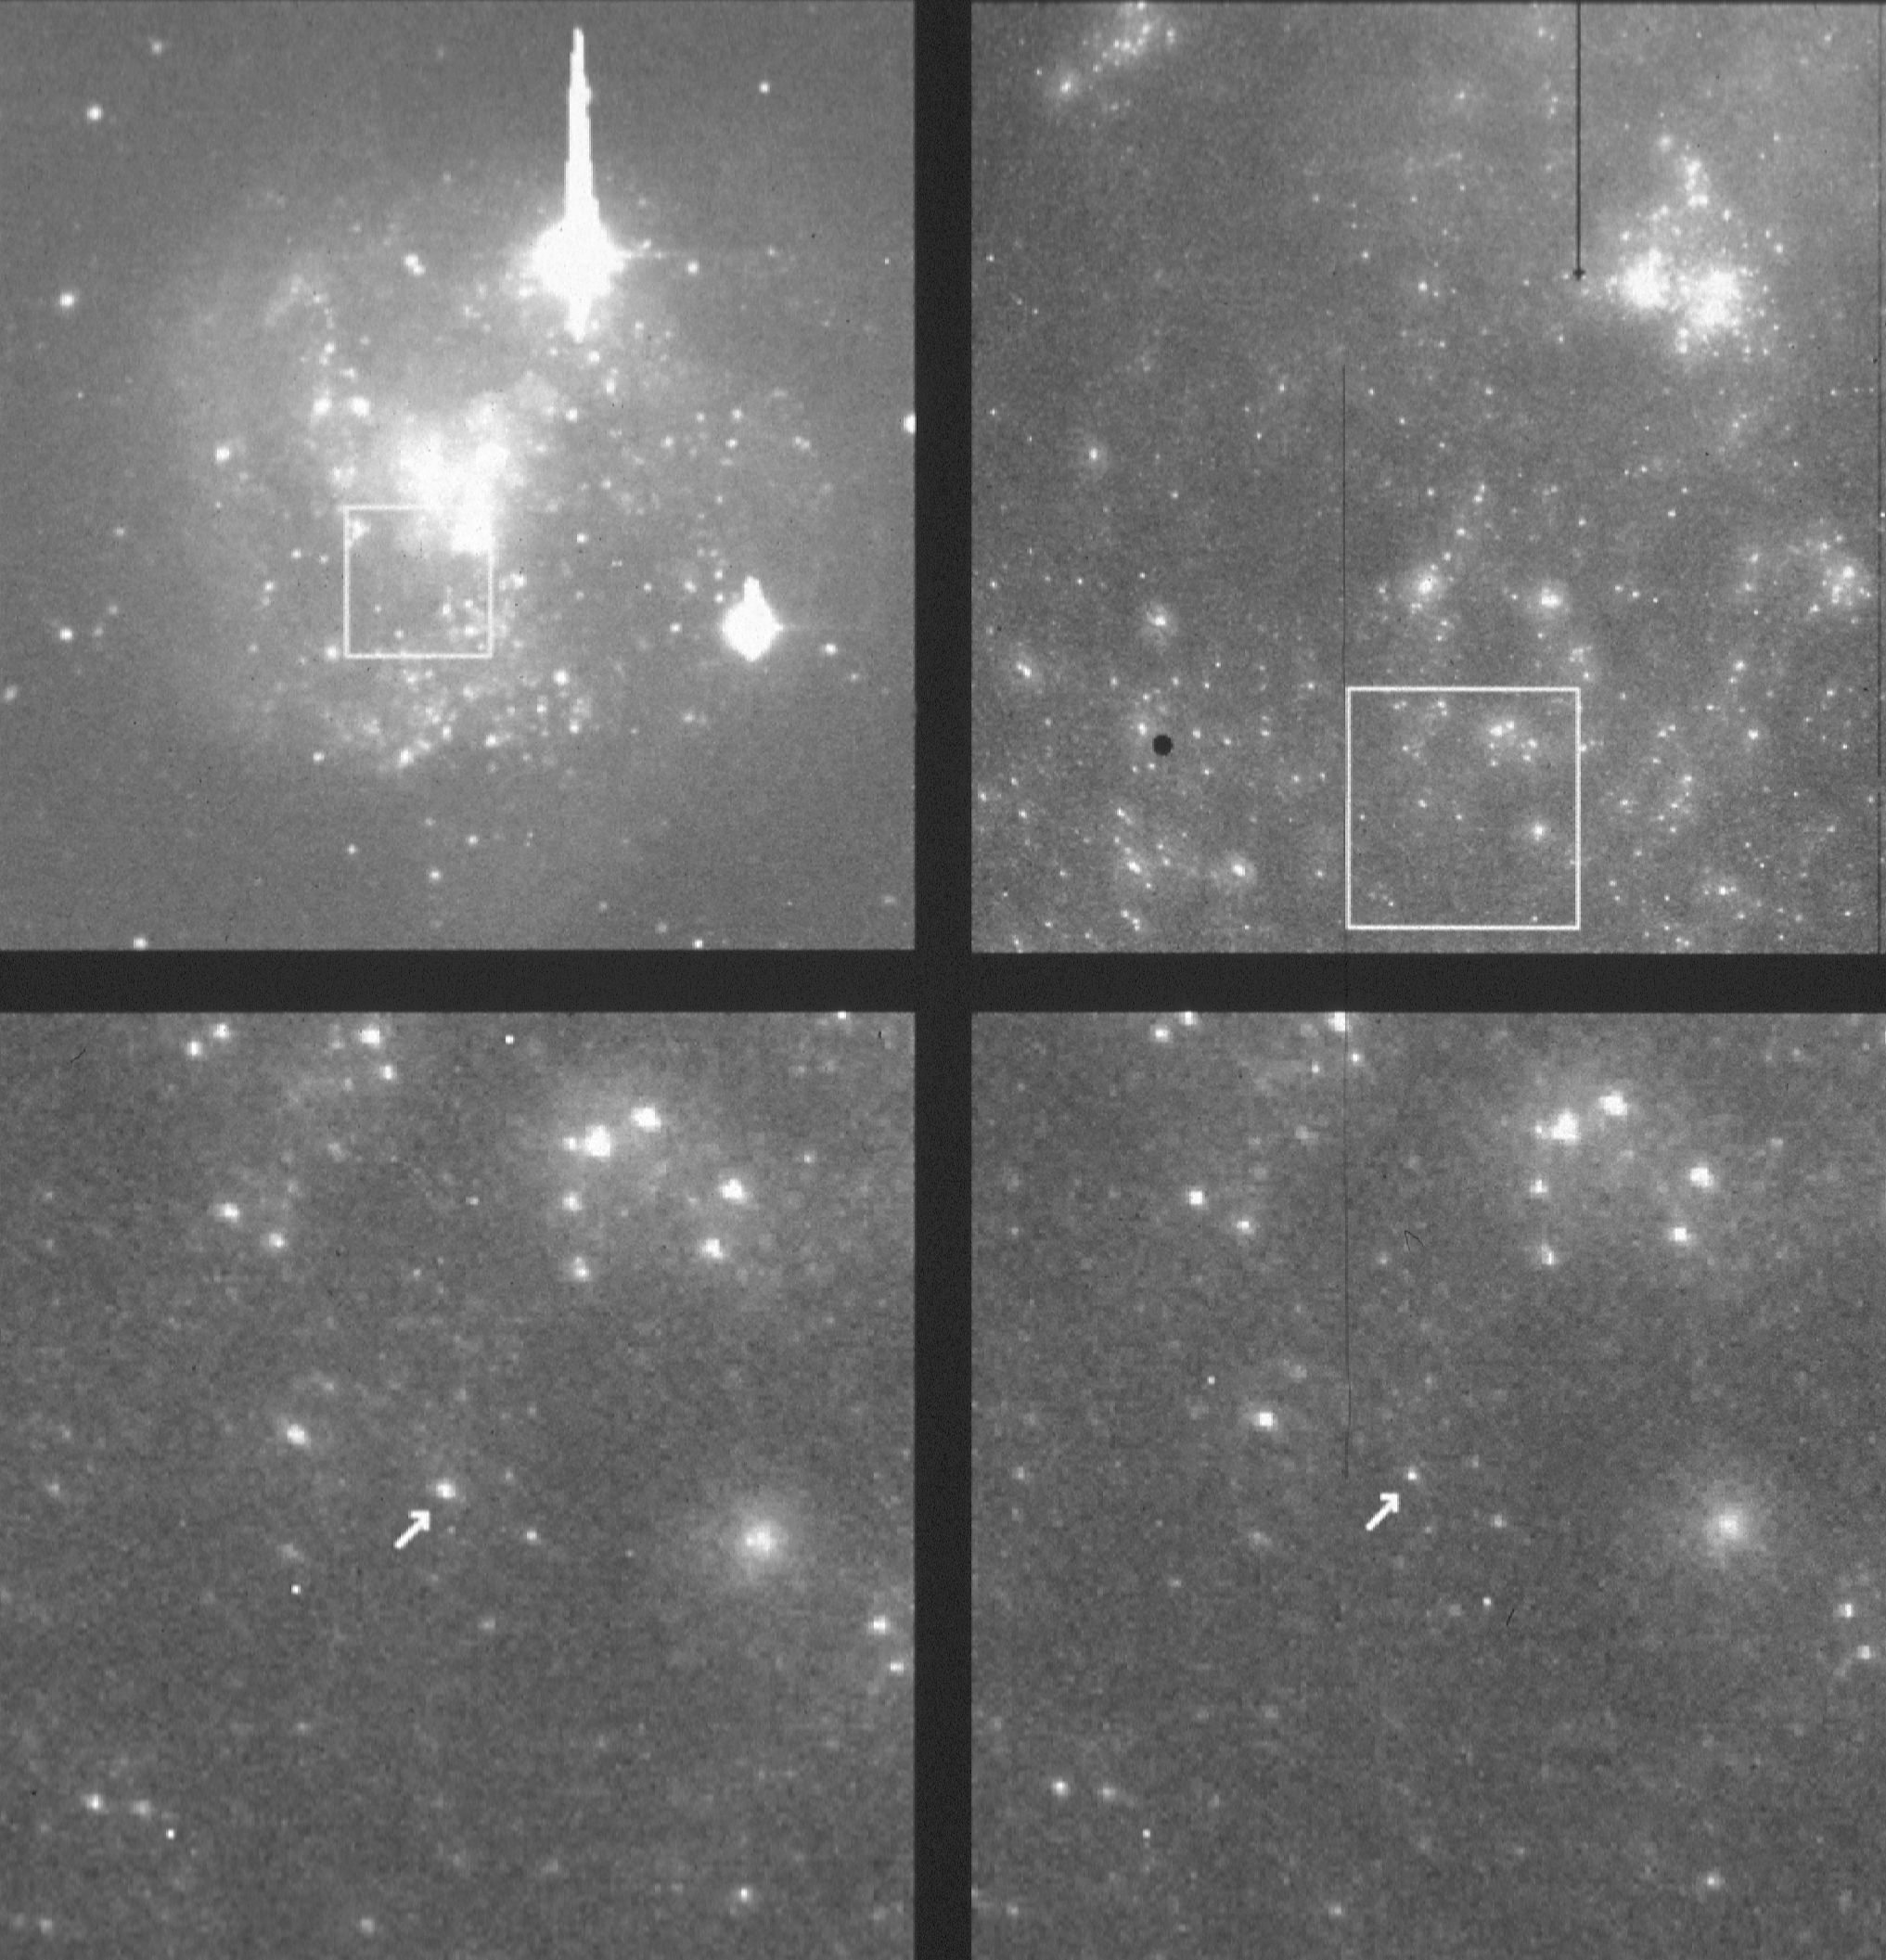

Cepheid variables in IC 4182

Using NASA/ESA Hubble Space Telescope (HST), an international team of astronomers has taken a major first step in redetermining the expansion rate of the universe. This rate, known as the Hubble Constant, is one of two critical numbers needed for making a precise determination of the size and age of the universe.

Credit: NASA/ESA